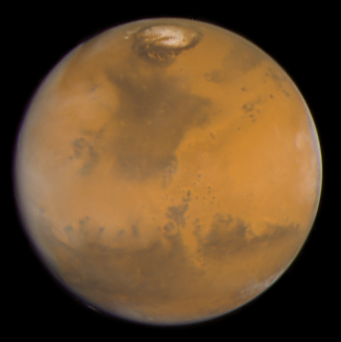

Martian colours Provide Clues About Martian Water (Hubble WFPC2 View)

This 'true-color' image of Mars shows the planet as it would look to human eyes. It is clearly more earth-toned than usually depicted in other astronomical images, including earlier Hubble pictures.

Credit: Jim Bell (Cornell University), Justin Maki (JPL), and Mike Wolff (Space Sciences Institute) and NASA/ESA